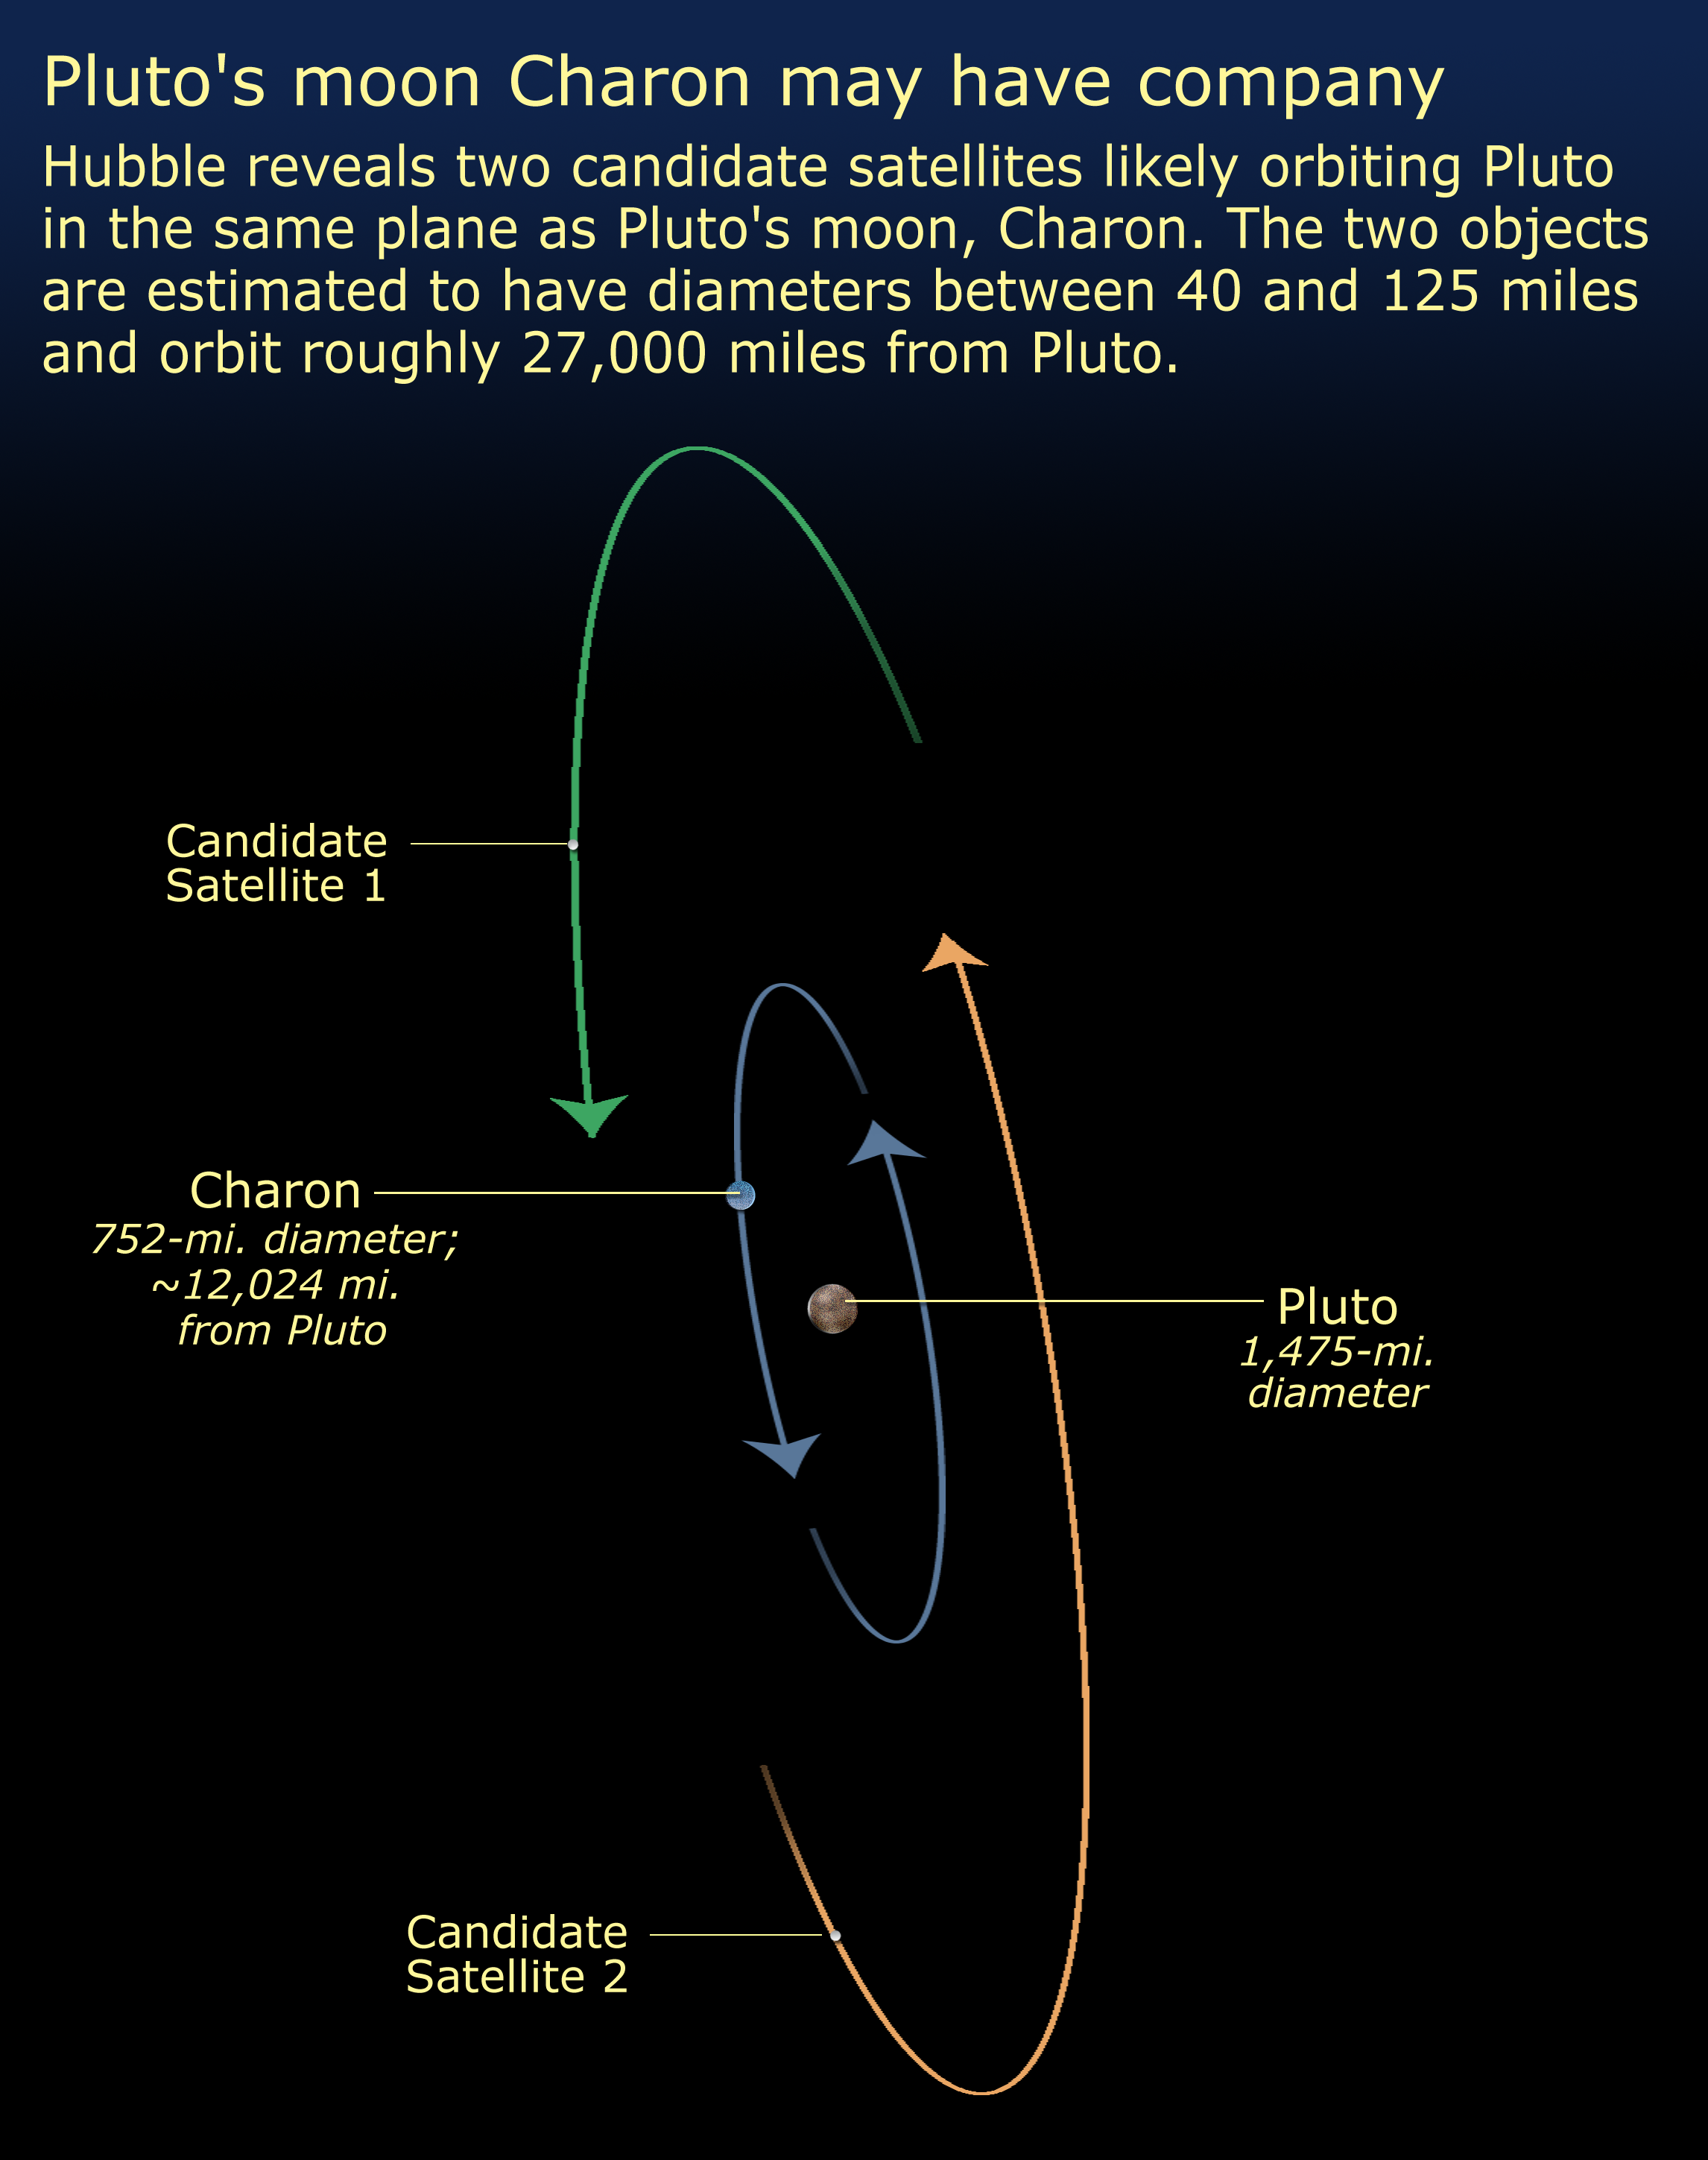

Pluto's Moon May Have Company (artist's impression)

Hubble reveals two previously undetected satellites likely orbiting Pluto in the same plane as Pluto's moon, Charon. The two objects are estimated to have diameters between 40 and 125 miles (64 and 200 kilometers) and orbit roughly 27,000 miles (43,000 kilometers) from Pluto.

Credit: NASA, ESA, and A. Feild (STScI)